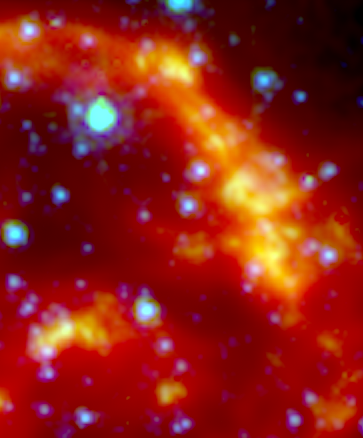

Spitzer Space Telescope: Kepler's Supernova Remnant (close-up, infrared data)

This image shows a section of the remains of Kepler's Supernova, the most recent exploding star to be seen in the Milky Way Galaxy. It was first observed 400 years ago when it was thought to be 'a new star'. In fact, it was the the gas and dust from an exploding star, rapidly expanding. These remnants have now reached a diameter of 14 light years wide and are still expanding at 4 million miles per hour.

This image, taken by the Spitzer Space Telescope in the Infrared, shows microscopic dust particles — coloured red — that have been heated by the supernova shock wave.

Credit: NASA, ESA, The Hubble Heritage Team (STScI/AURA)